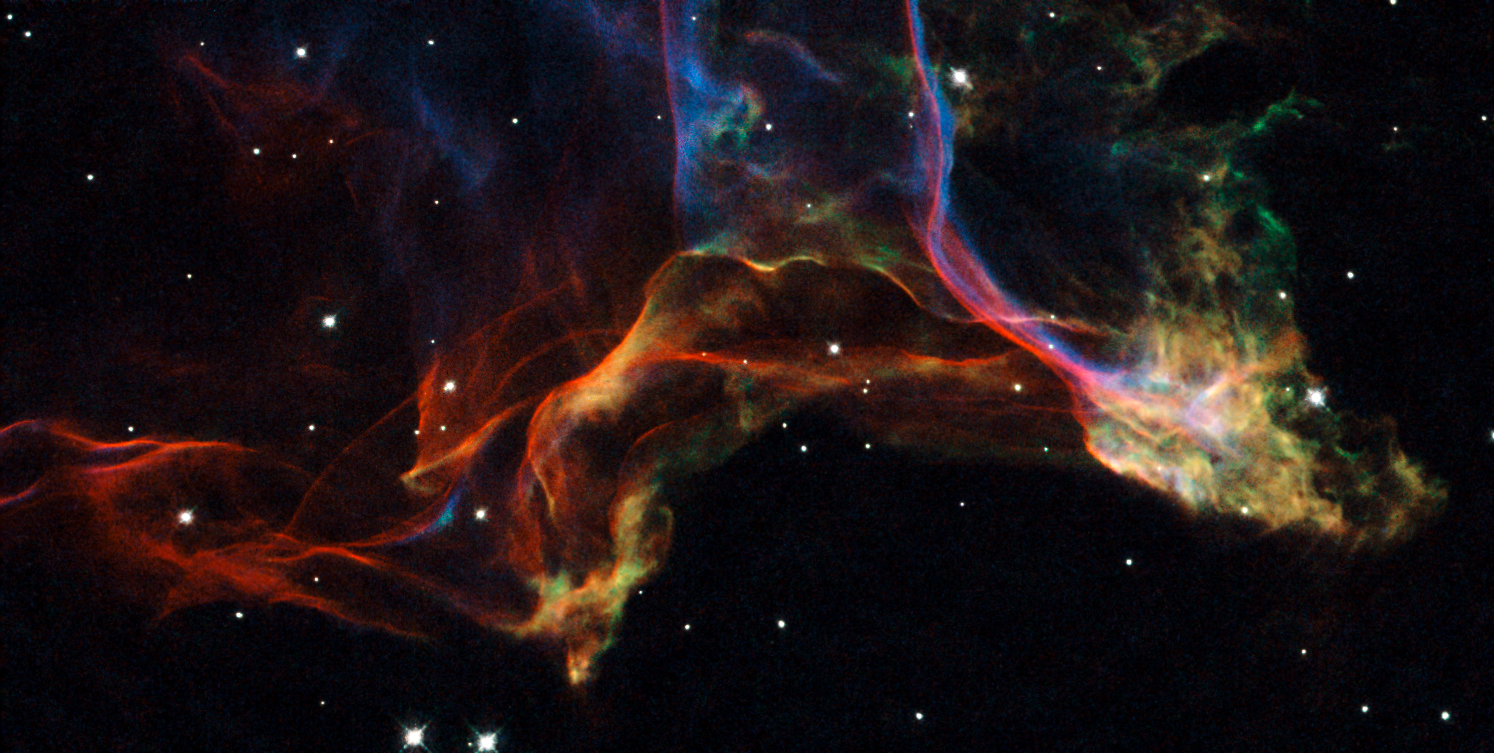

Uncovering the Veil Nebula

This image shows a beautiful portion of the Veil Nebula - the shattered remains of a supernova that exploded some 5-10,000 years ago. The intertwined rope-like filaments of gas result from the enormous amounts of energy released as the fast-moving debris from the explosion ploughs into its surroundings and creates shock fronts.

The image displays two characteristic features: sharp filaments and diffuse emission. These correspond to two different viewing geometries: sharp filaments correspond to an edge-on view of a shock front, and diffuse emission corresponds to a face-on view of it.

This image is a small portion of the Veil located in the western part of the Veil (to the left in the overview image). The entire structure spans about 3 degrees, corresponding to about 6 full moons.

The image was taken with the Wide Field and Planetary Camera 2 (WFPC2) on board the Hubble Space Telescope. The colour is produced by composite of three different images. The different colours indicate emission from different kinds of atoms excited by the shock: blue shows oxygen, green shows sulphur, and red shows hydrogen.

Credit: NASA, ESA, and the Hubble Heritage (STScI/AURA)-ESA/Hubble Collaboration. Acknowledgment: J. Hester (Arizona State University)